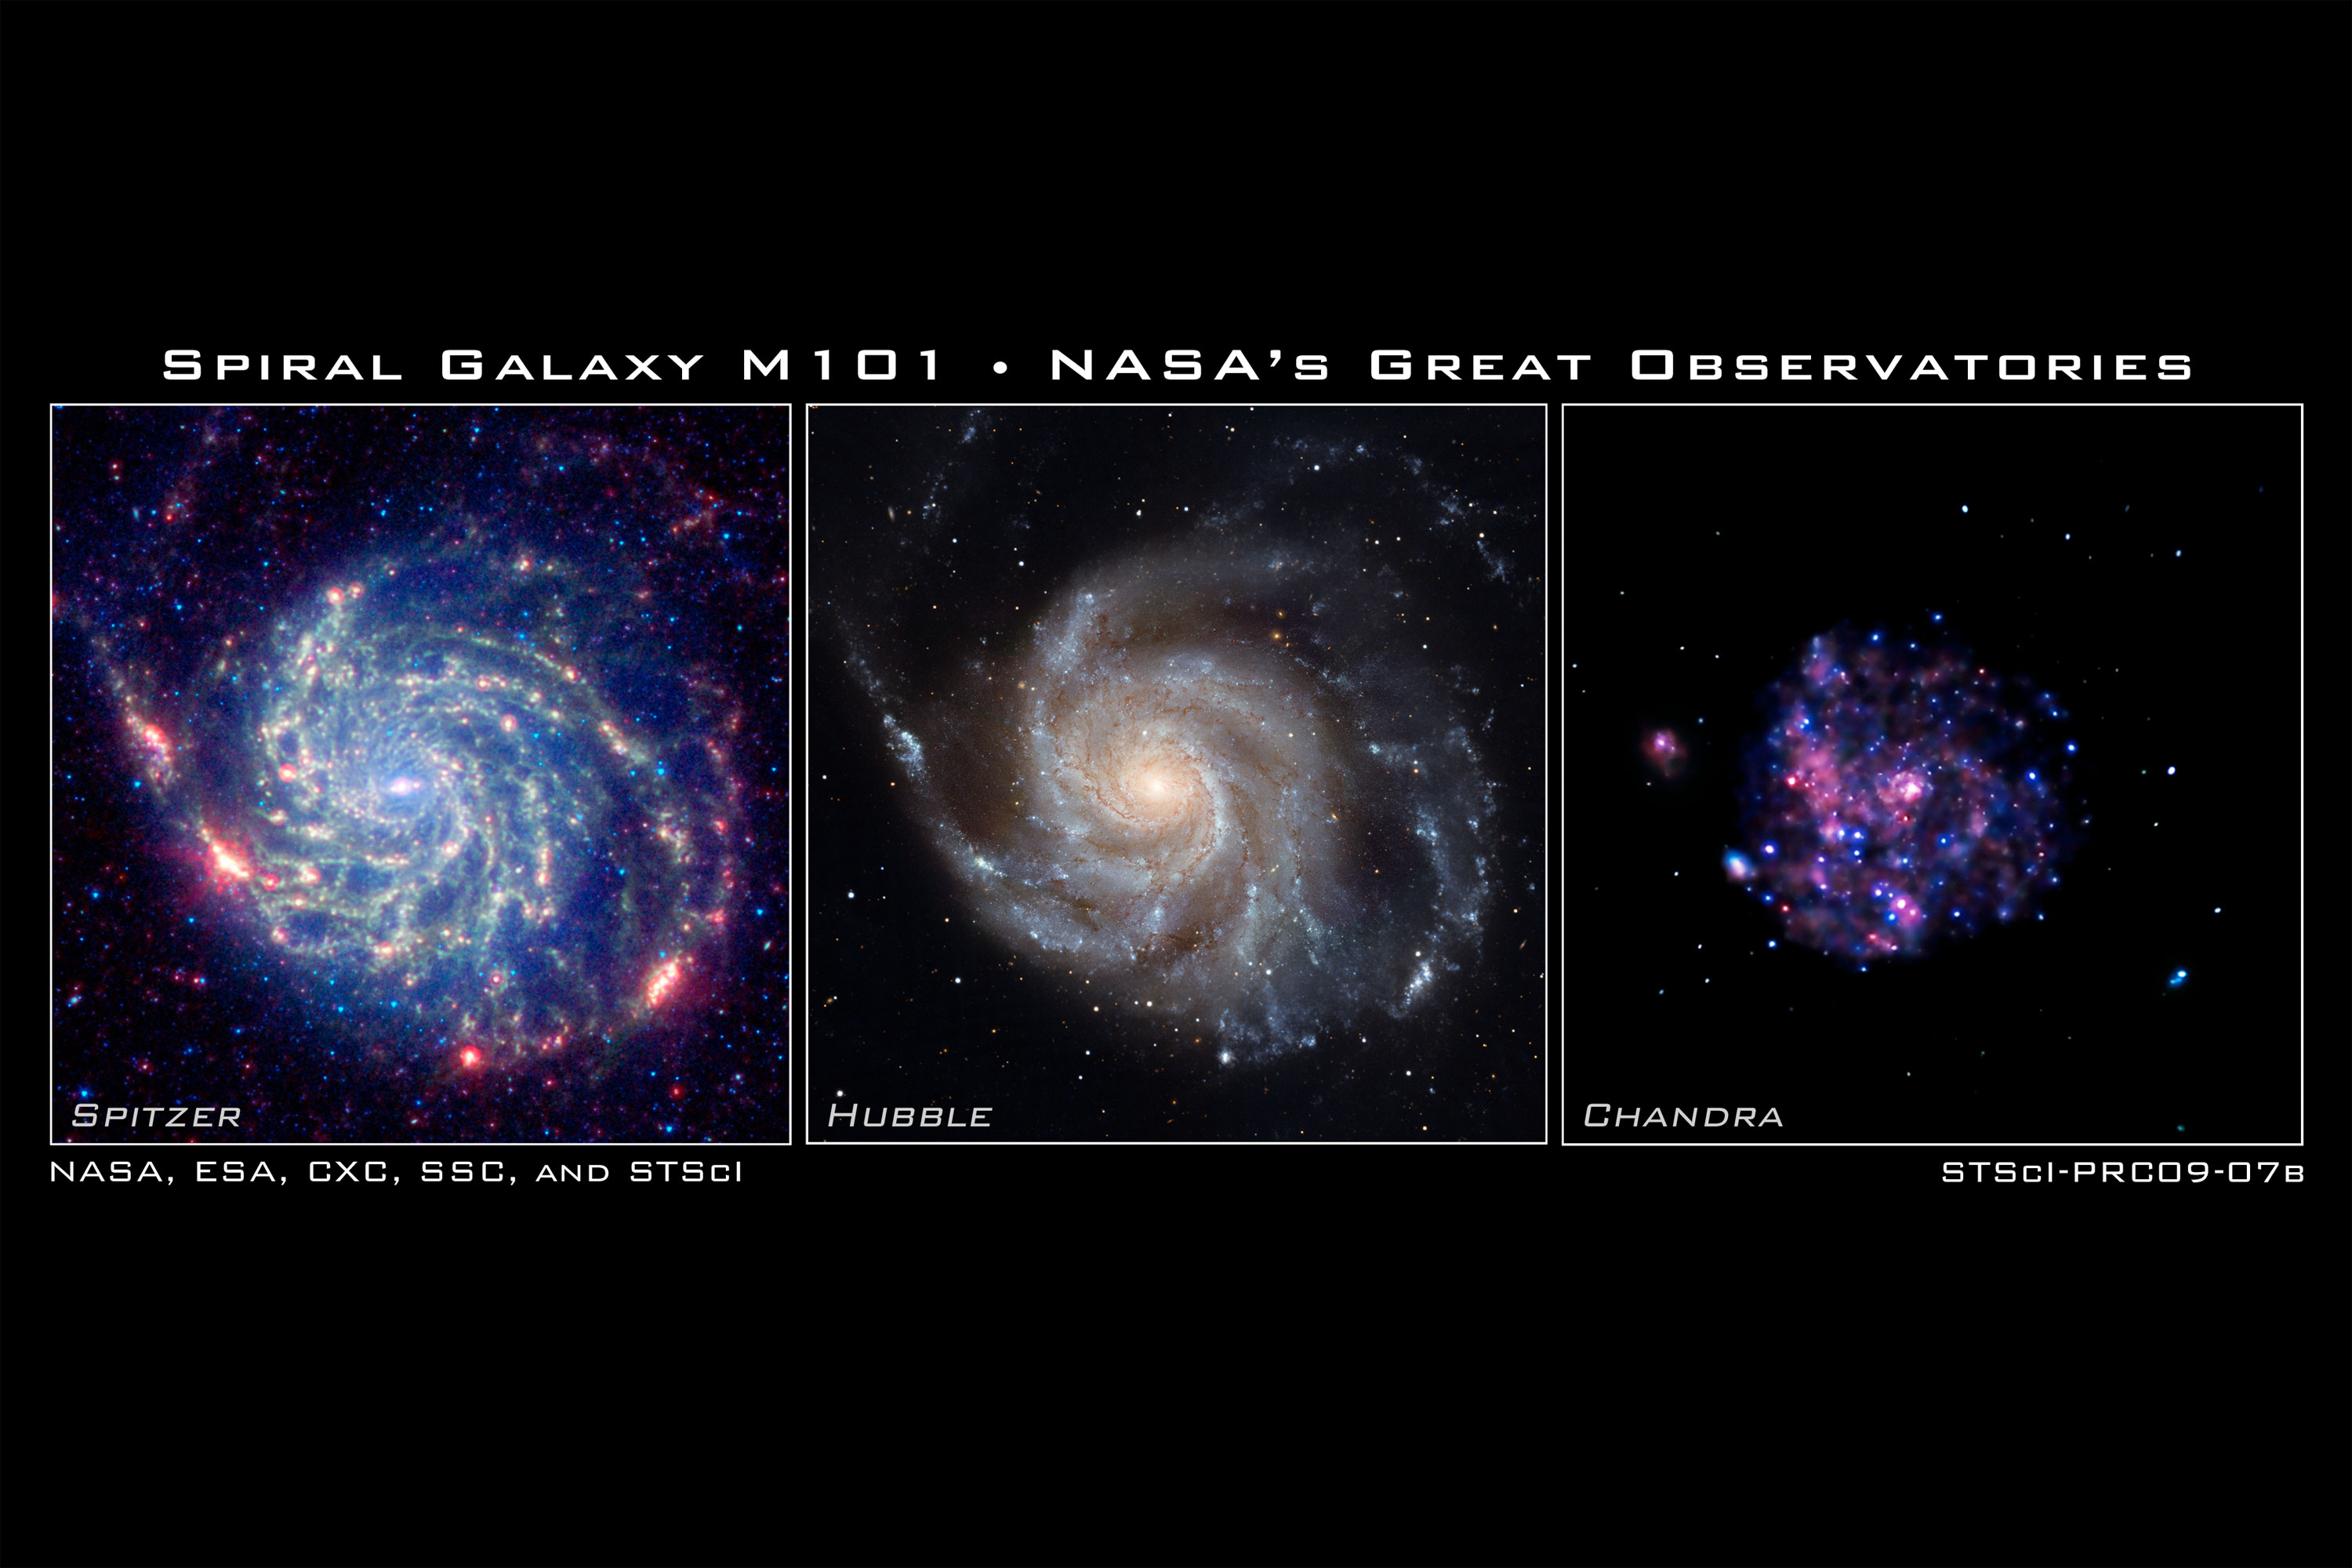

Spiral galaxy M101 - NASA's Great Observatories

The galaxy Messier 101 is a swirling spiral of stars, gas, and dust. Messier 101 is nearly twice as wide as our Milky Way Galaxy.

Spitzer's view [left frame], taken in infrared light, reveals the galaxy's delicate dust lanes as yellow-green filaments. Such dense dust clouds are where new stars can form. In this image, dust warmed by the light of hot, young stars glows red. The rest of the galaxy's hundreds of billions of stars are less prominent and form a blue haze. Astronomers can use infrared light to examine the dust clouds where stars are born.

Messier 101 has a pancake-like shape that we view face-on. This perspective shows off the spiral structure that gives it the nickname the Pinwheel Galaxy. In this Hubble image [middle frame], taken in visible light, the bright blue clumps are regions where new stars have formed. The yellowish core consists mainly of old stars. The dark brown dust lanes are colder and denser regions where interstellar clouds may collapse to form new stars. All of these features are shaped into a beautiful spiral pattern by a combination of gravity and rotation. Astronomers use visible light to study where and how stars form in spiral galaxies.

Chandra's image of Messier 101 [right frame], taken in X-ray light, shows the high-energy features of this spiral galaxy. X-rays are generally created in violent and/or high- temperature events. The white dots are X-ray sources that include the remains of exploded stars as well as material colliding at extreme speeds around black holes. The pink and blue colours are emission from million-degree gas and from clusters of massive stars. The pink emission indicates lower-energy X-rays and the blue higher-energy X- rays. One reason astronomers study Messier 101's X-rays is to better understand how black holes grow in spiral galaxies.

The International Year of Astronomy Great Observatories Image Unveiling is supported by the NASA Science Mission Directorate Astrophysics Division. The project is a collaboration between the Space Telescope Science Institute, the Spitzer Science Center, and the Chandra X-ray Center.

Credit for Spitzer Image: NASA, Jet Propulsion Lab/Caltech and K. Gordon (STScI)
Credit for Hubble Image: NASA, ESA, K. Kuntz (JHU), F. Bresolin (University of Hawaii), J. Trauger (Jet Propulsion Lab), J. Mould (NOAO), Y.-H. Chu (University of Illinois, Urbana) and STScI
Credit for Chandra Image: NASA, CXC and K. Kuntz (JHU)